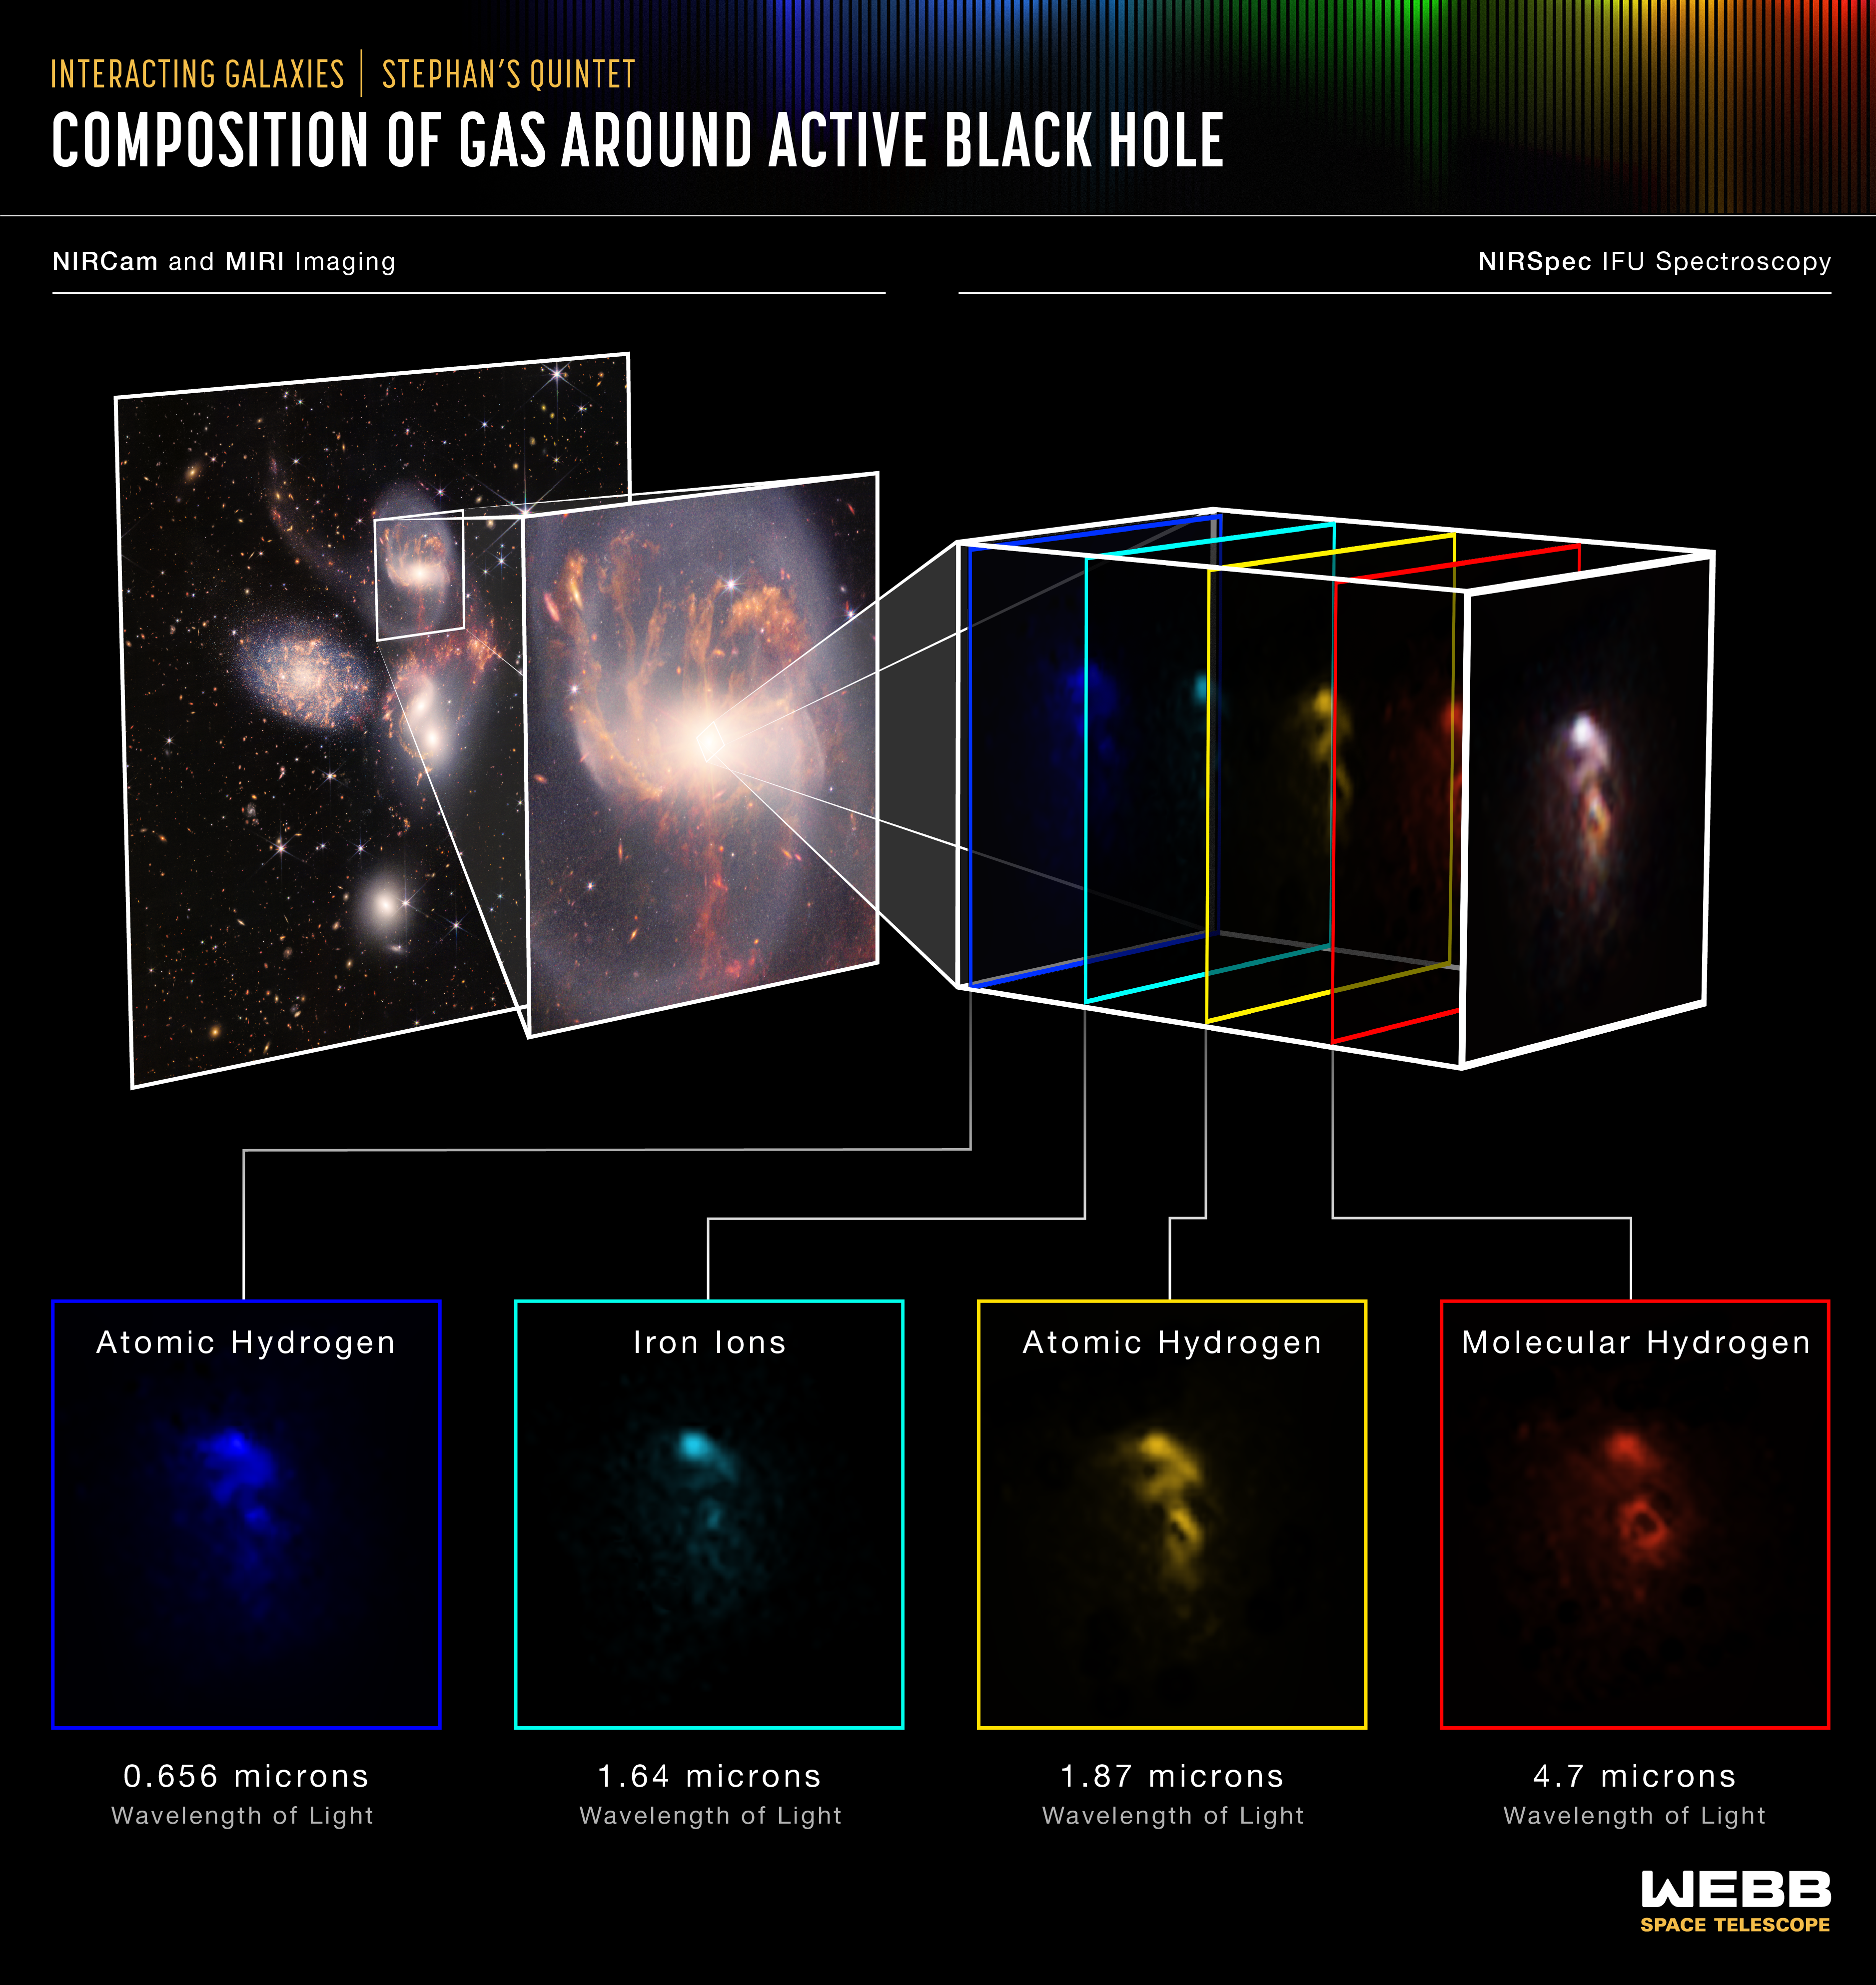

Composition of Gas Around Active Black Hole (NIRSpec IFU)

Stephan’s Quintet is a visual grouping of five galaxies located in the constellation Pegasus. Together, they are also known as the Hickson Compact Group 92 (HCG 92). Although called a “quintet,” only four of the galaxies are truly close together and caught up in a cosmic dance. The fifth and leftmost galaxy, called NGC 7320, is well in the foreground compared with the other four.

Tight groups like this may have been more common in the early universe when their superheated, infalling material may have fueled very energetic black holes called quasars. Even today, the topmost galaxy in the group – NGC 7319 – harbours an active galactic nucleus, a supermassive black hole 24 million times the mass of the Sun. It is actively pulling in material and puts out light energy equivalent to 40 billion Suns.

The NASA/ESA/CSA James Webb Space Telescope studied the active galactic nucleus in great detail with the Near-Infrared Spectrograph (NIRSpec). The instrument’s integral field units (IFUs) – a combination of a camera and spectrograph – provided the Webb team with a “data cube,” or collection of images of the galactic core’s spectral features. Using IFUs, scientists can measure spatial structures, determine the velocity of those structures, and get a full range of spectral data. Much like medical magnetic resonance imaging (MRI), the IFUs allow scientists to “slice and dice” the information into many images for detailed study.

NIRSpec’s IFUs pierced through the shroud of dust to measure the bright emission from outflows of hot gas near the active black hole. The instrument saw the gas near the supermassive black hole in wavelengths never detected before, and it was able to determine its composition.

Some of the key emission lines seen by NIRSpec are shown in this image and represent different phases of gas. Atomic hydrogen, in blue and yellow, allows scientists to discover the structure of the outflow. Iron ions, in teal, trace the places where the hot gas is located. Molecular hydrogen, in red, is very cold and dense, and traces both outflowing gas and the reservoir of fuel for the black hole. The bright, active nucleus itself has been removed from these images to better show the structure of the surrounding gas.

By using NIRSpec, scientists have gained unprecedented information about the black hole and its outflow. Studying these relatively nearby galaxies helps scientists better understand galaxy evolution in the much more distant universe.

NIRSpec was built for the European Space Agency (ESA) by a consortium of European companies led by Airbus Defence and Space (ADS) with NASA’s Goddard Space Flight Center providing its detector and micro-shutter subsystems.

For a full array of Webb’s first images and spectra, including downloadable files, please visit: https://esawebb.org/initiatives/webbs-first-images/

Credit: NASA, ESA, CSA, and STScI